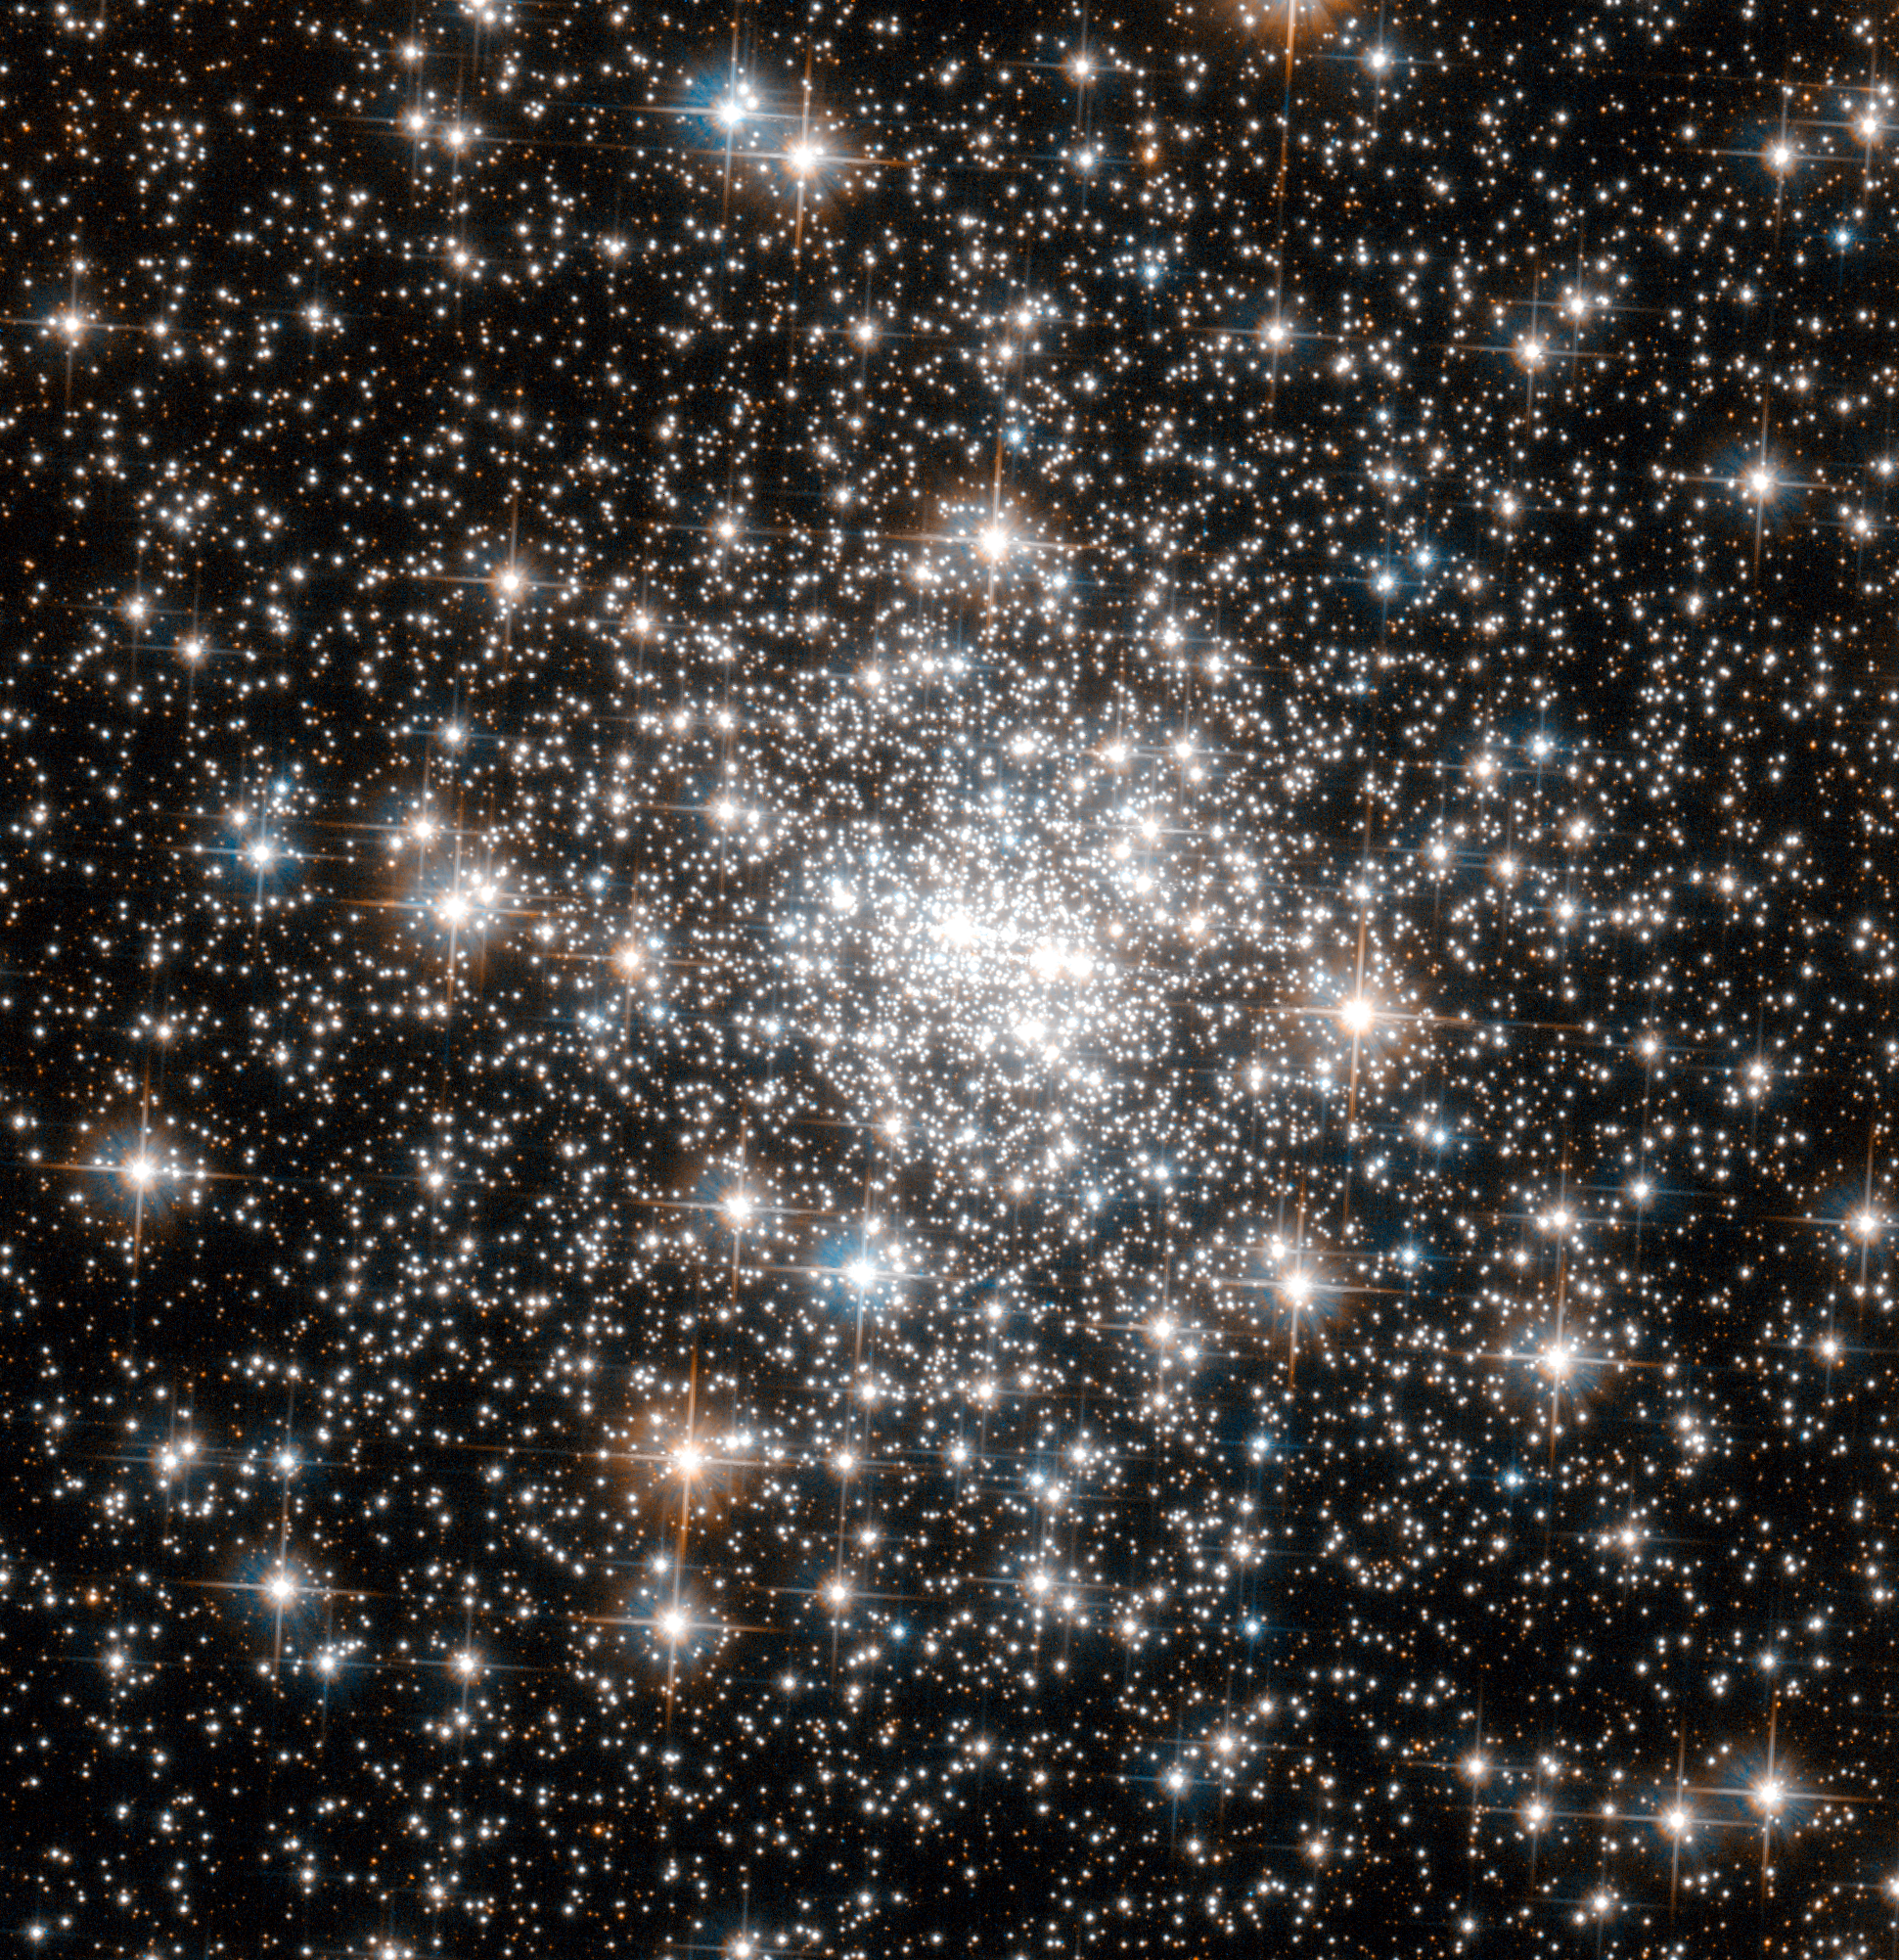

Standing out from the crowd

The compact nature of globular clusters is a double-edged sword. On the one hand, having so many stars of a similar age in one bundle gives astronomers insights into the chemical makeup of our galaxy in its early history. But, at the same time, the high density of stars in the cores of globulars also makes it difficult for astronomers to resolve individual stars.

The core of NGC 6642, shown here in this Hubble Space Telescope image, is particularly dense, making this globular a difficult observational target for most telescopes. Furthermore, it occupies a very central position in our galaxy, which means that images inadvertently capture many stars that don’t belong to the cluster — these “field stars” just get in the way.

However, using Hubble’s powerful Advanced Camera for Surveys (ACS), astronomers can identify and remove such distracting field stars, and resolve the cluster’s dense core in unprecedented detail. Using Hubble’s ACS, astronomers have already made many interesting finds about NGC 6642. For example, many “blue stragglers” (stars which seemingly lag behind in their rate of aging) have been spotted in this globular, and it is known to be lacking in low-mass stars.

This picture was created from visible and infrared images taken with the Wide Field Channel of the Advanced Camera for Surveys. The field of view is approximately 1.6 by 1.6 arcminutes.

Credit: ESA/Hubble & NASA